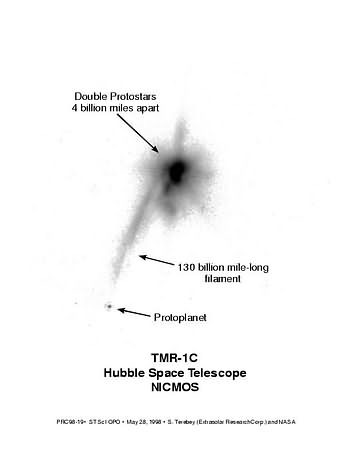

Identification of features of TWR-1C

Originally suspected to be the first directly detected planet outside our solar system follow up observations have shown that the object is most likley a backgrpund star whose light is has been dimmed and reddened by interestellar dust. However, even newer observations now brought the phantom planet back from oblivion.

It seems that TMR-1C is a protoplanet, located about 1 000 AU from its protobinary host stars. The two protostars, a prominent gas filament and the protoplanet itself are the visible features of the system on this image.

Credit: NASA & ESA